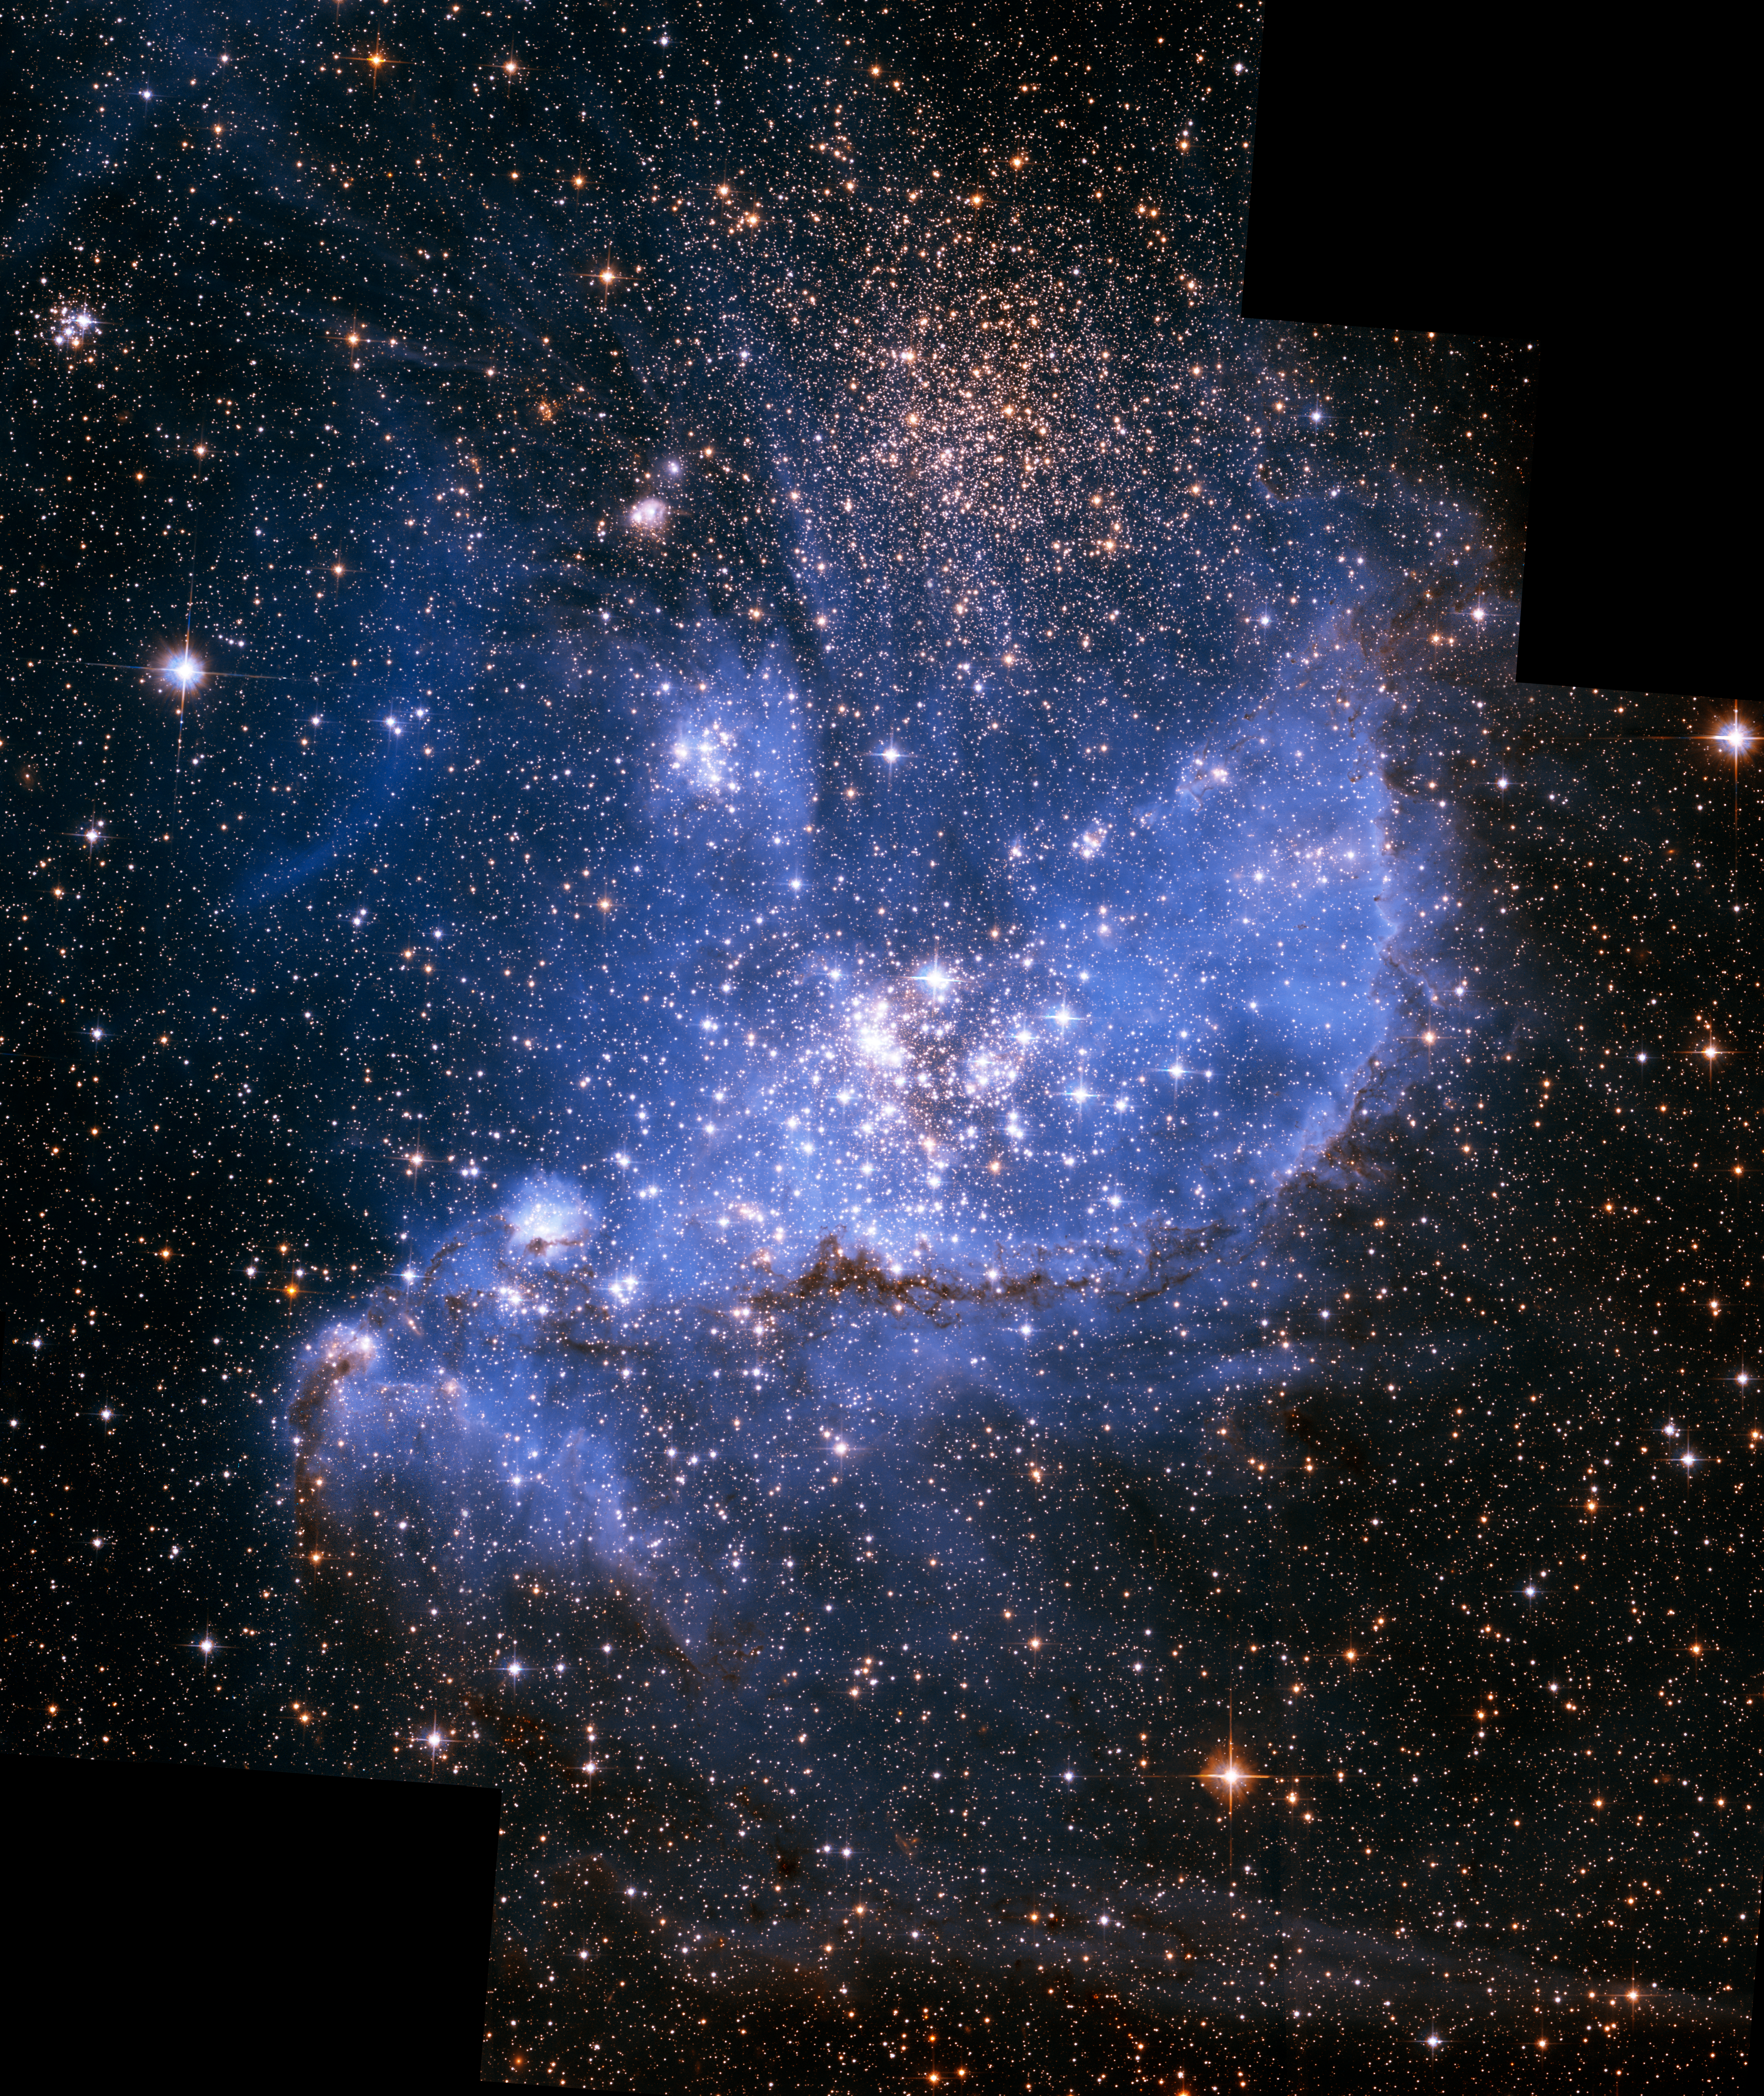

NGC 346 (Hubble)

This image features NGC 346, one of the most dynamic star-forming regions in nearby galaxies, as seen by the NASA/ESA Hubble Space Telescope.

NCG 346 is located in the Small Magellanic Cloud (SMC), a dwarf galaxy close to our Milky Way.

Credit: NASA, ESA, A. James (STScI)